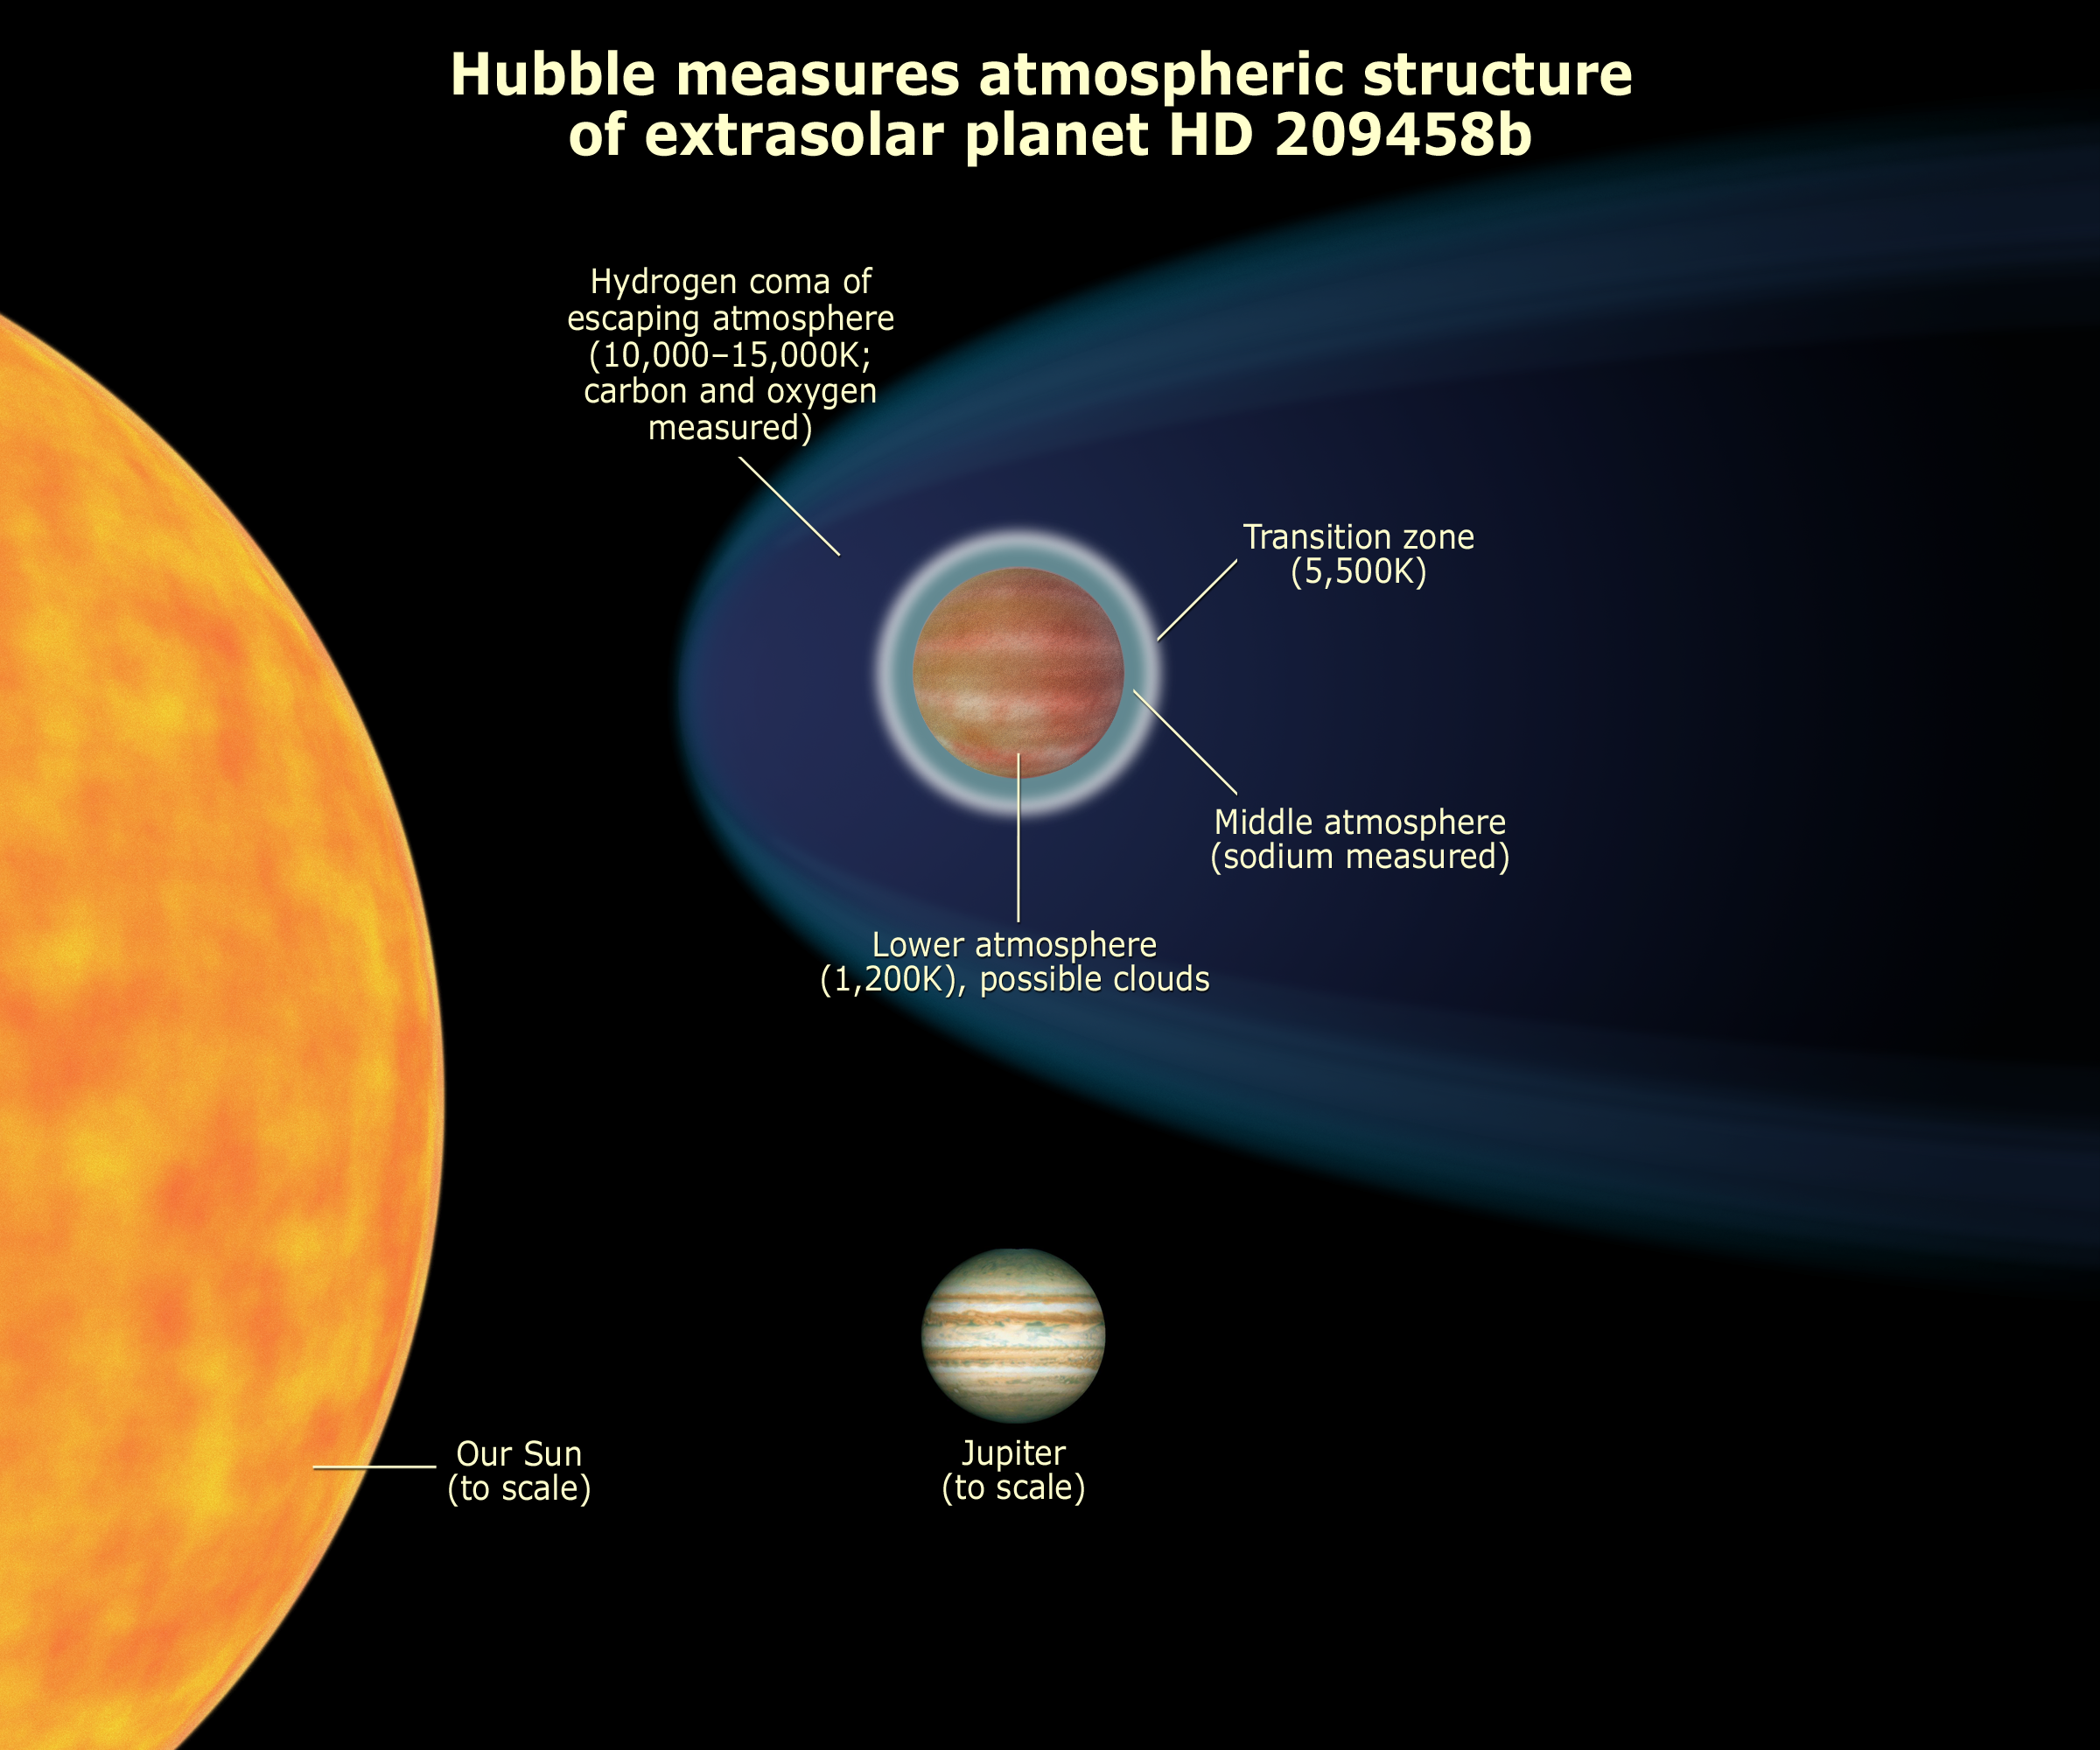

Hubble measures atmospheric structure of extrasolar planet HD 209458b

The powerful vision of NASA's Hubble Space Telescope has allowed astronomers to study for the first time the layer-cake structure of the atmosphere of a planet orbiting another star. Hubble discovered a dense upper layer of hot hydrogen gas where the super-hot planet's atmosphere is bleeding off into space.

Credit: NASA, ESA, and A. Feild (STScI)